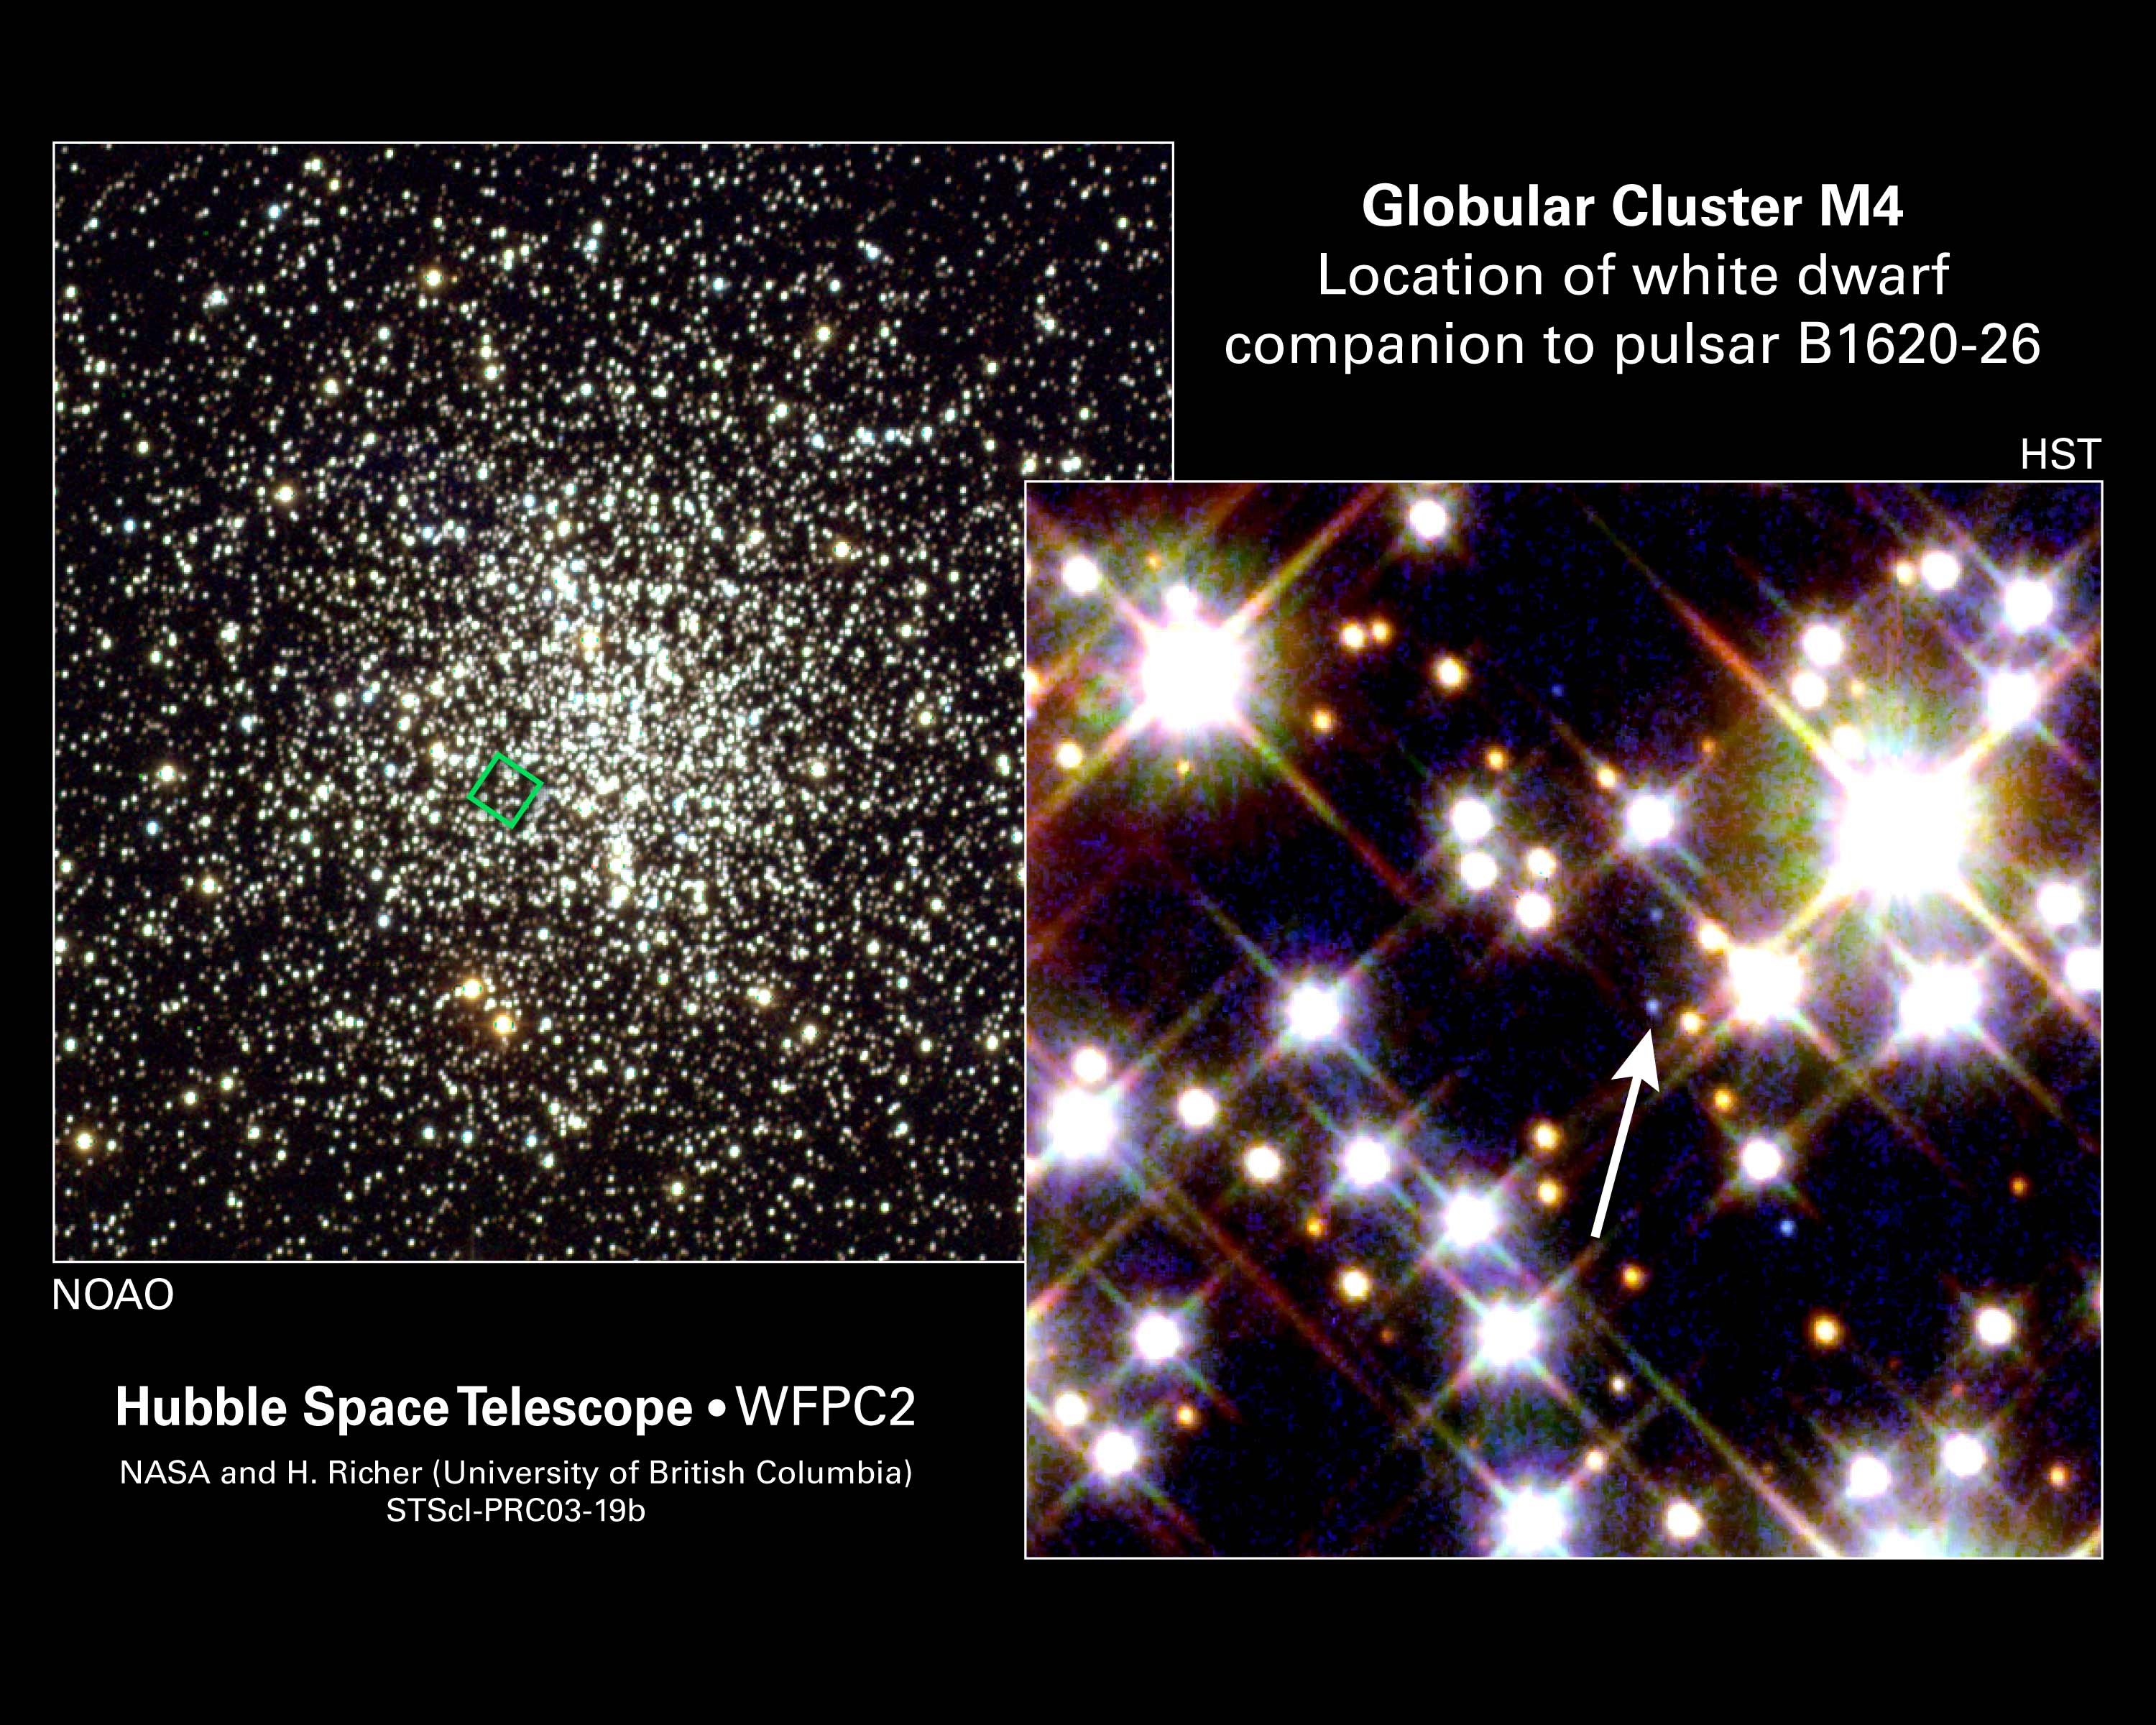

White Dwarf Yields Key to Planet's Mass

Three unlikely companions - two burned-out stars and a planet - orbit each other near the crowded core of an ancient globular cluster of more than 100,000 stars. Only one companion, however, is visible in the images. In the image at right, taken by NASA/ESA Hubble Space Telescope, the white arrow points to a burned-out white dwarf star. Radio astronomers discovered the white dwarf and the other burned-out star - a rapidly spinning neutron star, called a pulsar - a decade ago. The third companion's identity was a mystery. Was it a planet or a brown dwarf? The object was too small and too dim to image.

Hubble observations of the dim white dwarf helped astronomers to precisely measure the mass of the mystery object (2.5 times larger than the mass of Jupiter), confirming that it is a planet. In fact, it is the farthest and oldest known planet. Hubble's Wide Field and Planetary Camera 2 resolved individual stars near M4's densely packed core [right] and pinpointed the white dwarf.

Credit: NASA/ESA and H. Richer (University of British Columbia)